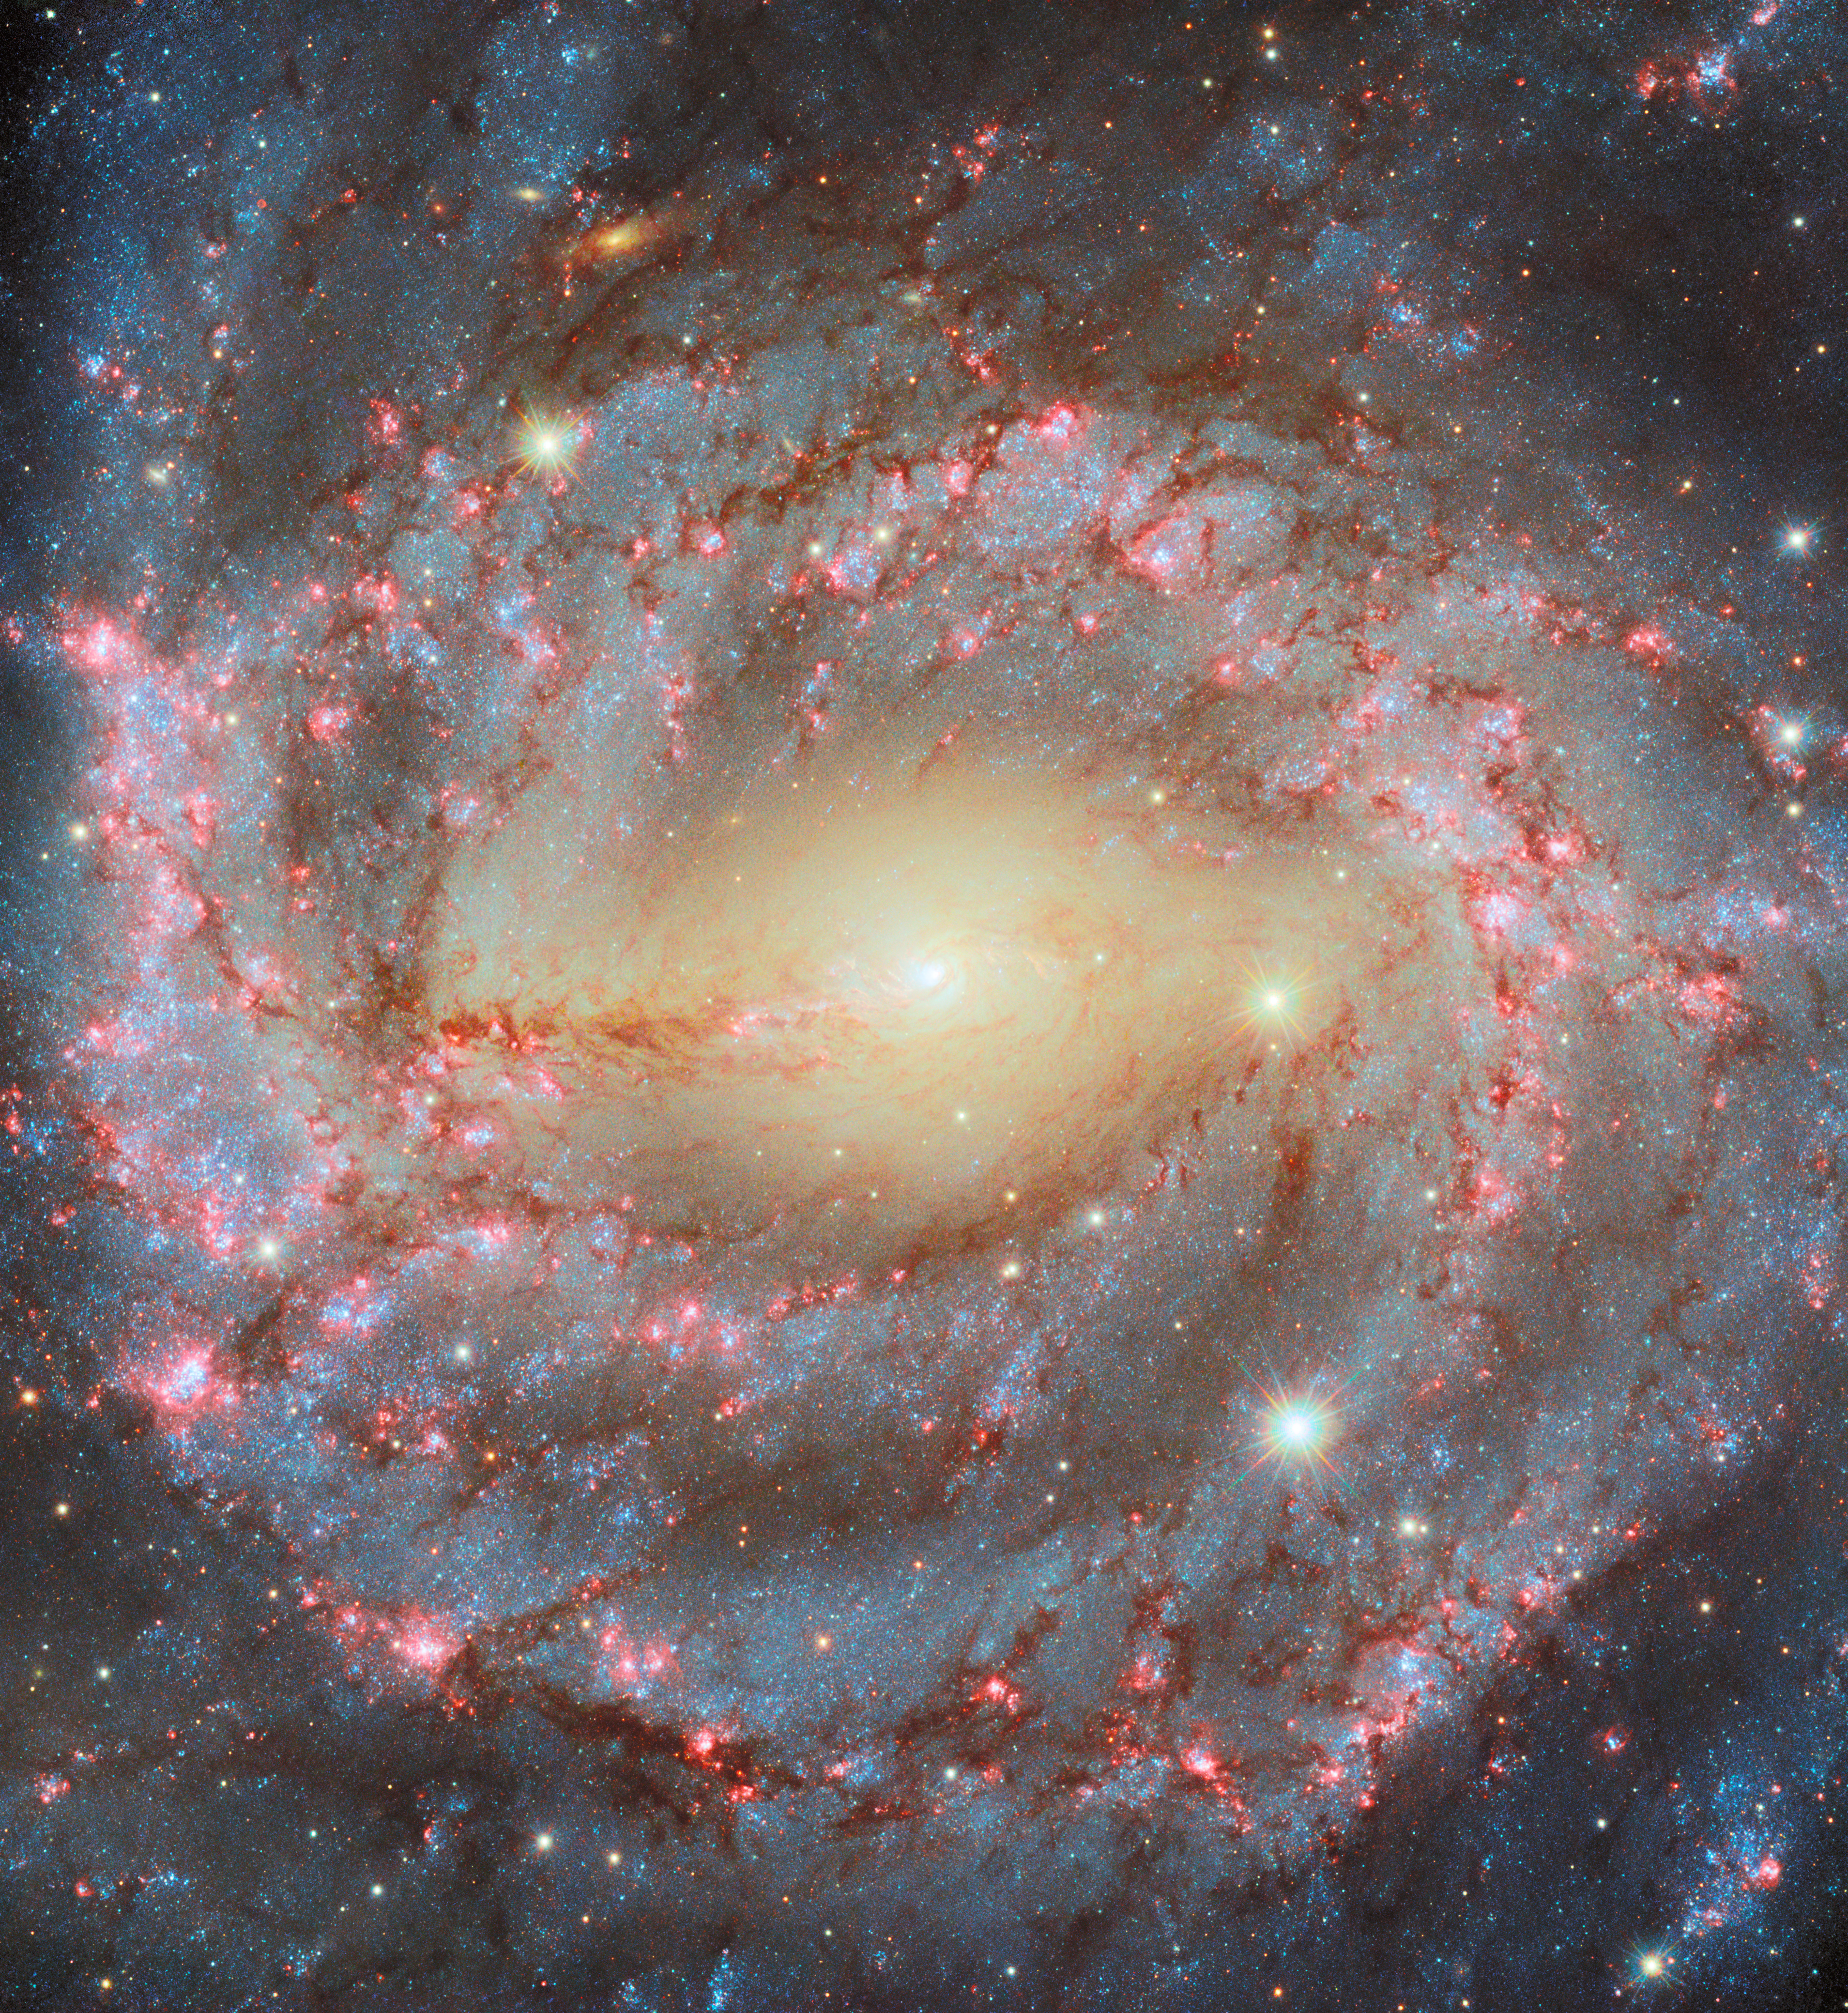

Hubble revisits a grand spiral

Today’s NASA/ESA Hubble Space Telescope Picture of the Week features the glorious spiral galaxy NGC 5643, which is located roughly 40 million light-years away in the constellation Lupus. NGC 5643 is what’s known as a grand design spiral, referring to how the galaxy’s two large, winding spiral arms are clear to see. The spiral arms are defined by bright blue stars, lacy reddish-brown dust clouds and pink star-forming regions.

As fascinating as the galaxy appears at visible wavelengths, some of NGC 5643’s most interesting features are invisible to the human eye. Ultraviolet and X-ray images and spectra of NGC 5643 show that the galaxy hosts an active galactic nucleus: an especially bright galactic core powered by a feasting supermassive black hole. When a supermassive black hole ensnares gas from its surroundings, the gas collects in a disc that heats up to hundreds of thousands of degrees. The superheated gas shines brightly across the electromagnetic spectrum, but especially at X-ray wavelengths.

NGC 5643’s active galactic nucleus isn’t the brightest source of X-rays in the galaxy, though. Researchers using ESA’s XMM-Newton discovered an even brighter X-ray-emitting object, called NGC 5643 X-1, on the galaxy’s outskirts. What could be a more powerful source of X-rays than a supermassive black hole? Surprisingly, the answer appears to be a much smaller black hole! While the exact identity of NGC 5643 X-1 is not yet known, evidence points to a black hole that is about 30 times more massive than the Sun. Locked in an orbital dance with a companion star, the black hole ensnares gas from its stellar companion, creating a superheated disc that outshines the galactic centre.

NGC 5643 was also the subject of a previous Picture of the Week. The new image incorporates additional wavelengths of light, including the red color that is characteristic of gas heated by massive young stars.

Credit: ESA/Hubble & NASA, A. Riess, D. Thilker, D. De Martin (ESA/Hubble), M. Zamani (ESA/Hubble)